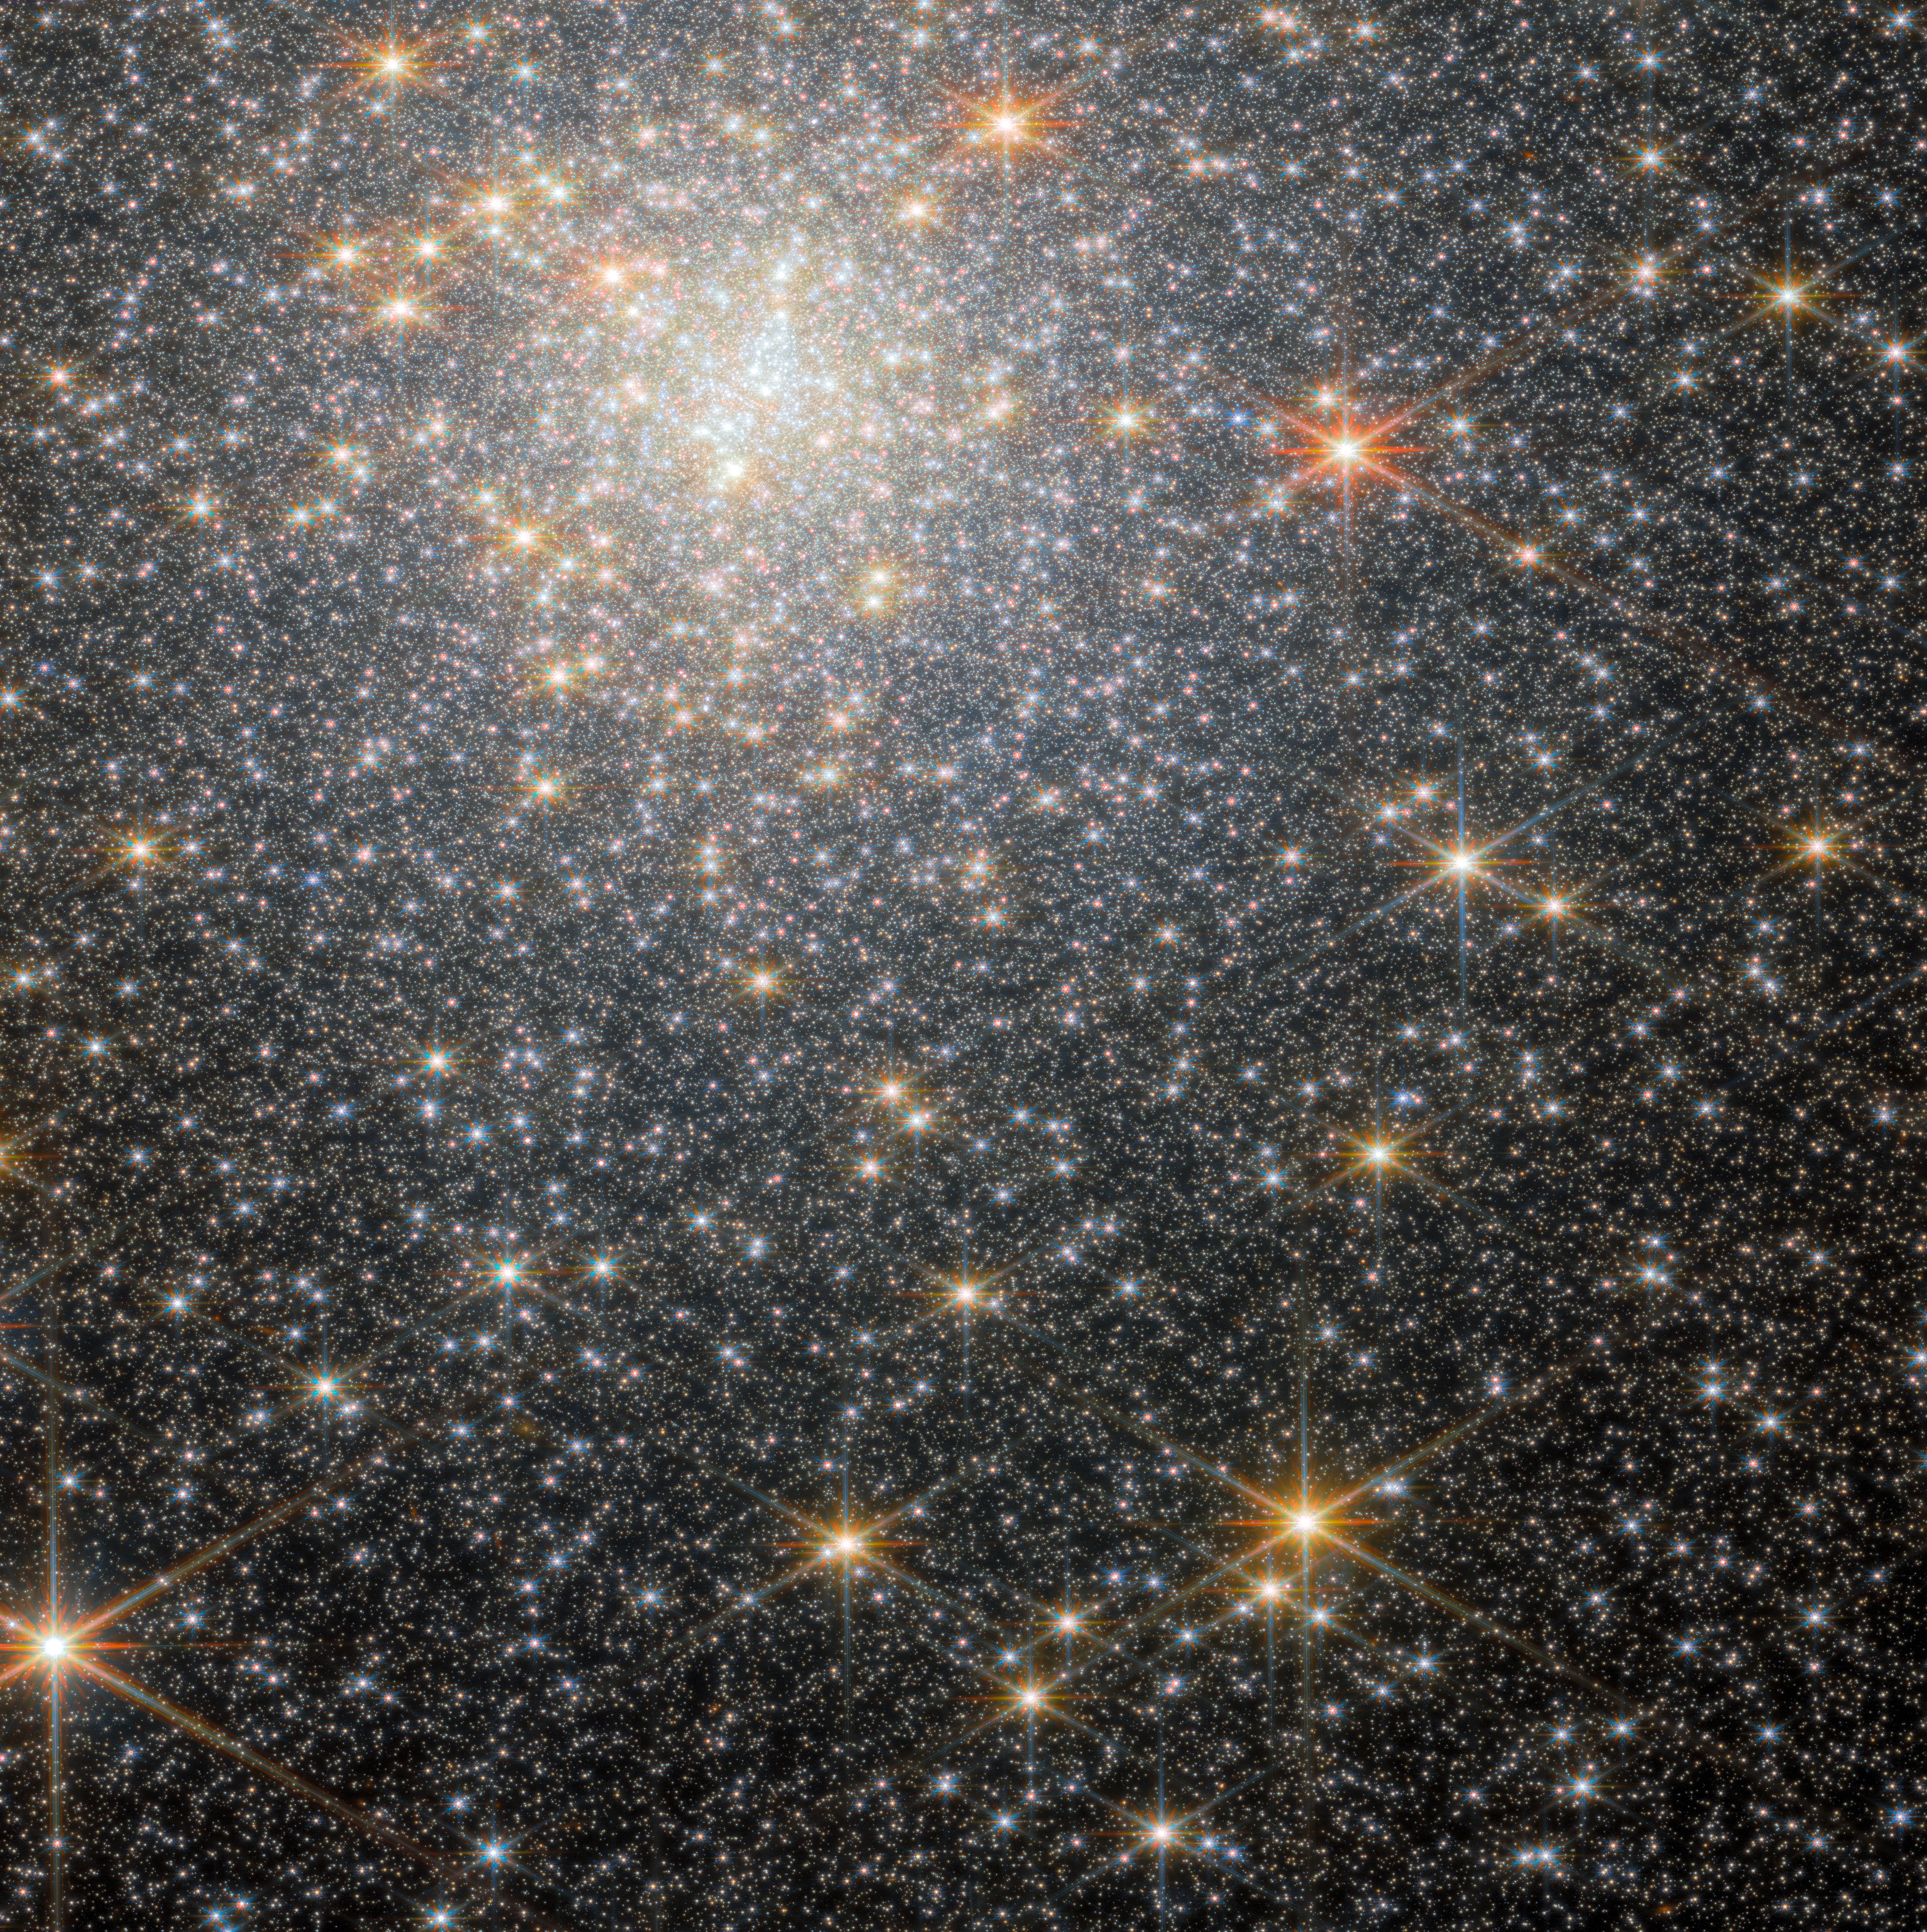

Star-studded cluster (NGC 6440 NIRCam wide-field image)

This new image from the NASA/ESA/CSA James Webb Space Telescope features NGC 6440, a globular cluster that resides roughly 28 000 light-years from Earth in the constellation Sagittarius. The object was first discovered by William Herschel in May of 1786.

Globular clusters like NGC 6440 are roughly spherical, tightly packed, collections of old stars bound together by gravity. They can be found throughout galaxies, but often live on the outskirts. They hold hundreds of thousands to millions of stars that are on average about one light-year apart, but they can be as close together as the size of our Solar System. NGC 6440 is known to be a high-mass and metal-rich cluster that formed and is orbiting within the Galactic bulge, which is a dense, near-spherical region of old stars in the inner part of the Milky Way.

This image was obtained with 2023 data from Webb’s Near-InfraRed Camera (NIRCam) as part of an observation programme to explore the stars in the cluster and to investigate details of the cluster’s pulsars. A pulsar is a highly magnetised, rotating neutron star that emits a beam of electromagnetic radiation from their magnetic poles. To us, that beam appears as a short burst or pulse as the star rotates. Pulsars spin extremely fast. Astronomers have clocked the fastest pulsars at more than 716 rotations per second, but a pulsar could theoretically rotate as fast as 1500 rotations per second before slowly losing energy or breaking apart.

The new data obtained by the science team indicate the first evidence from Webb observations of abundance variations of helium and oxygen in stars in a globular cluster. These results open the window for future, in-depth investigations of other clusters in the Galactic bulge, which were previously infeasible with other telescope facilities given the significant crowding of stars in the cluster and the strong reddening caused by interstellar dust between the cluster and Earth.

Credit: ESA/Webb, NASA & CSA, P. Freire Acknowledgement: M. Cadelano and C. Pallanca